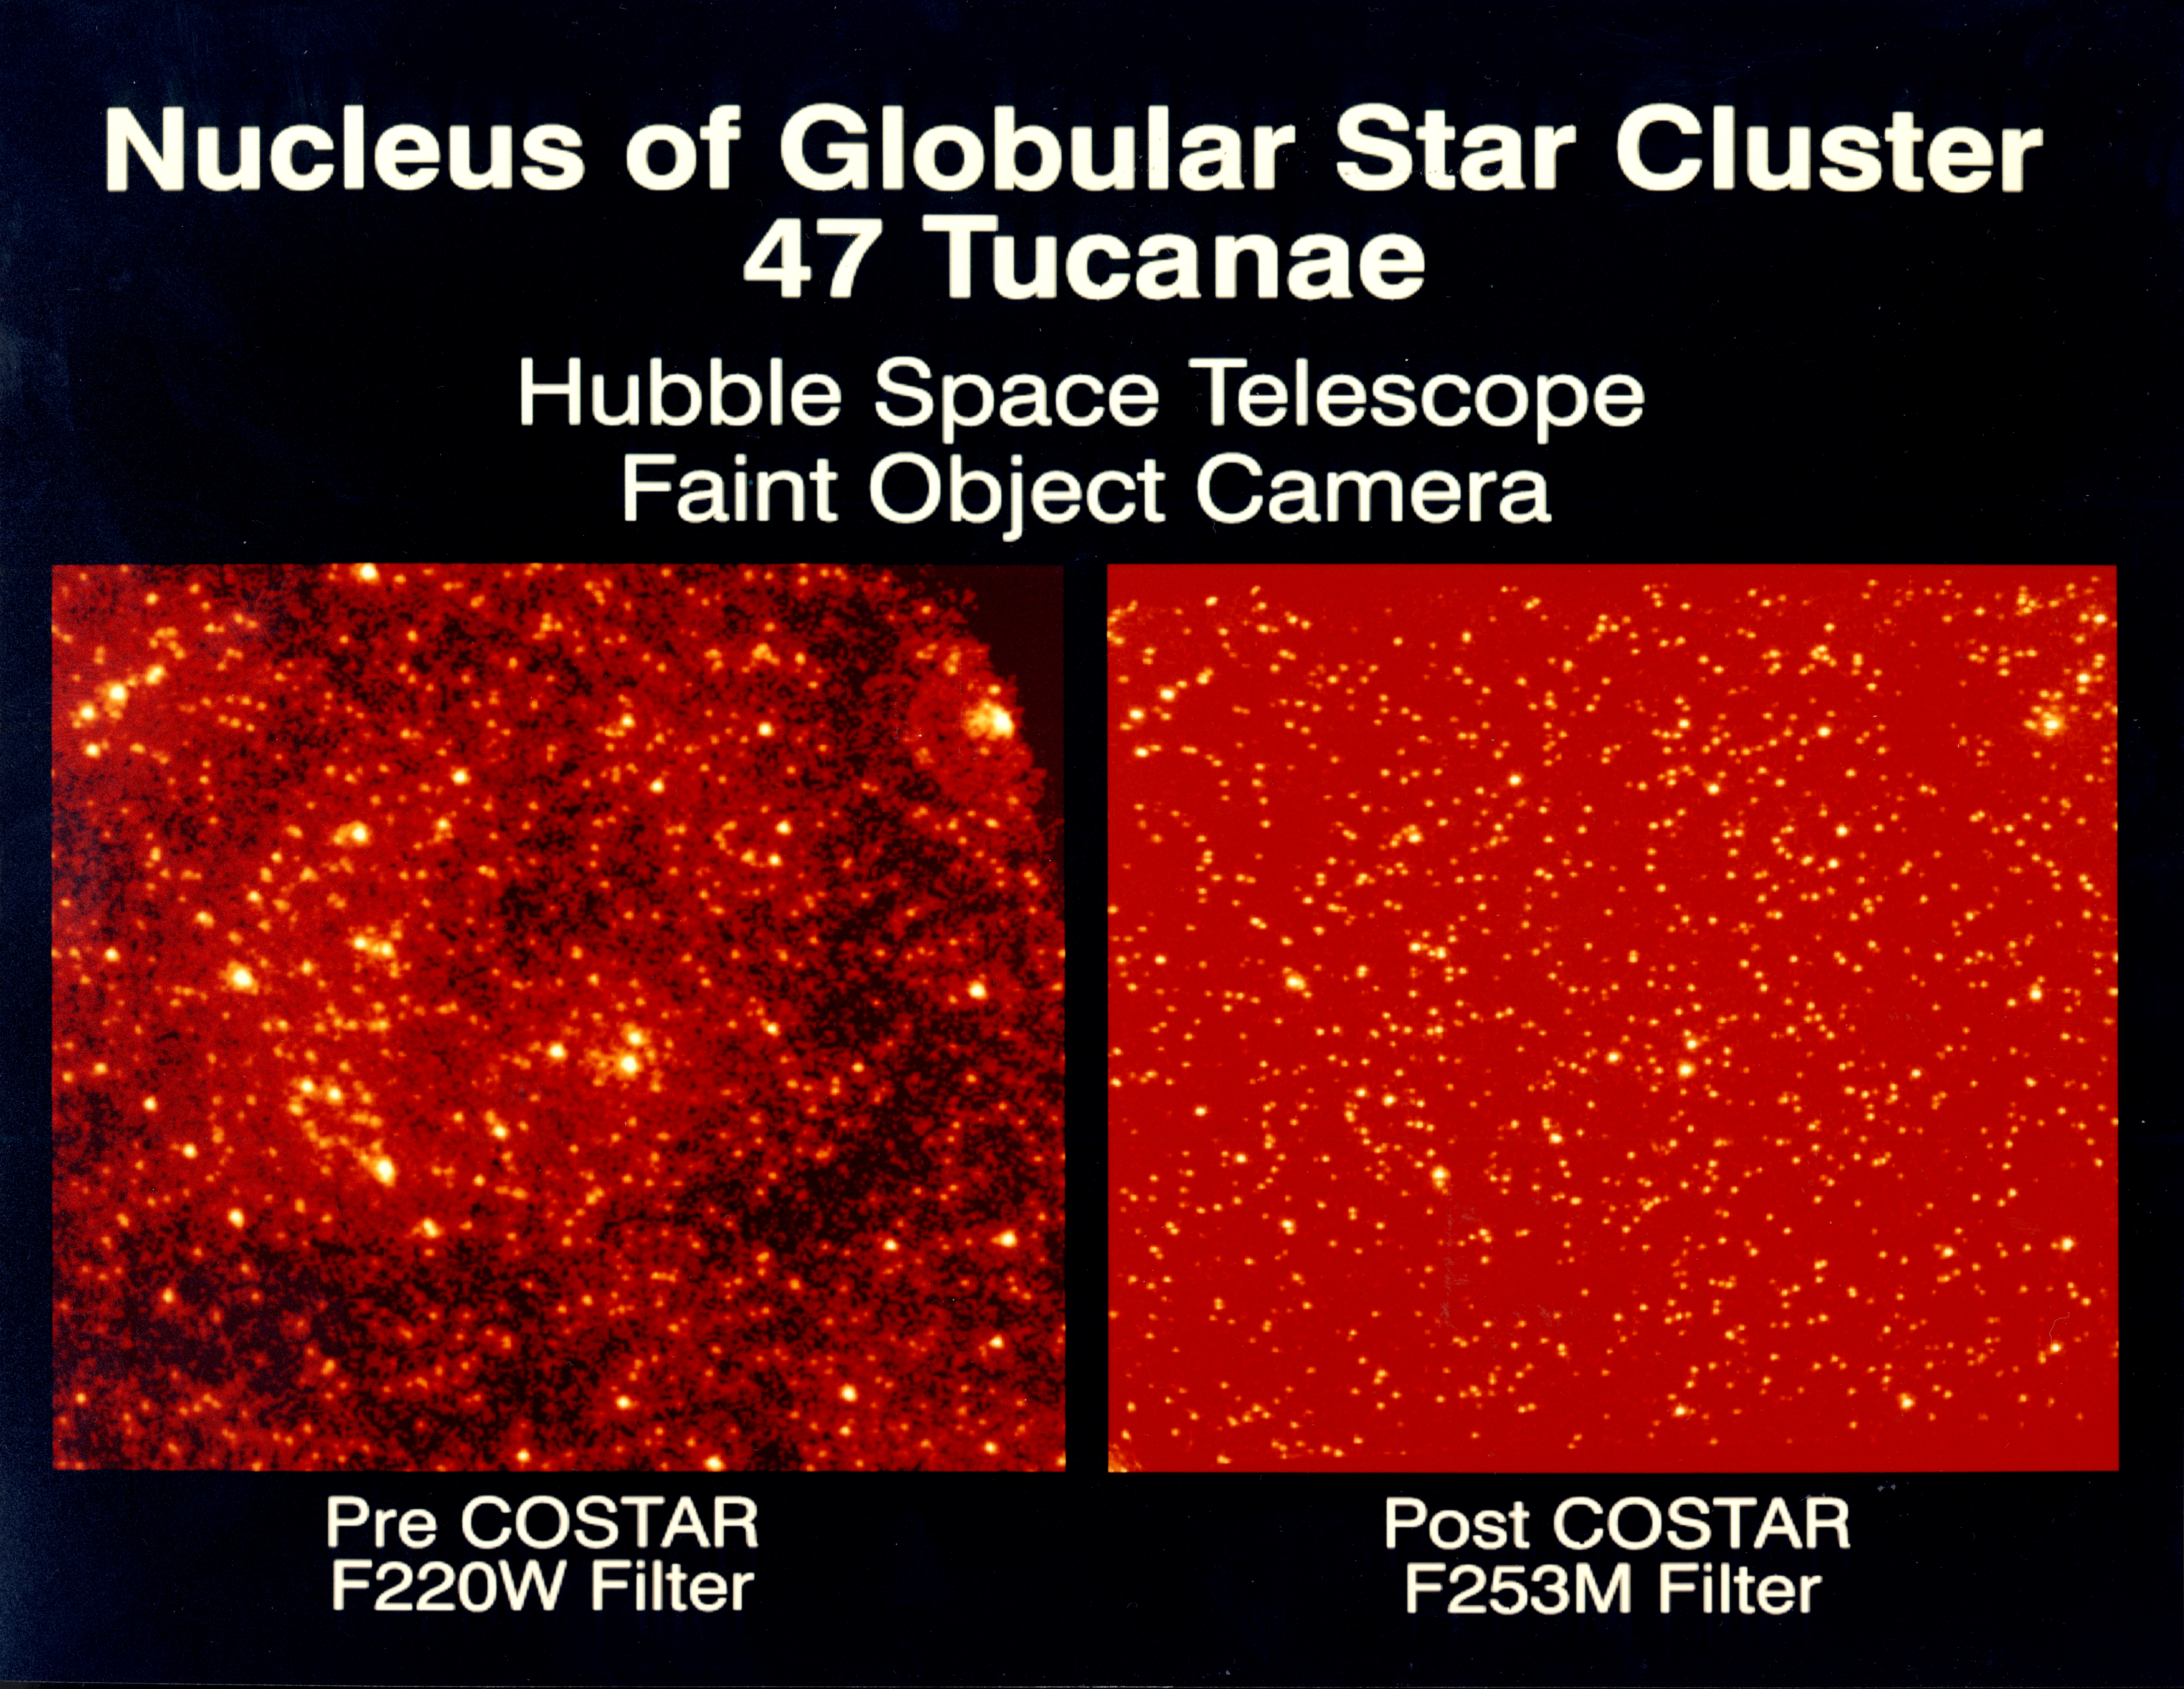

Star cluster

These comparison images of the core of the globular cluster 47 Tucanae (NGC104) were taken with the COSTAR Corrected Faint Object Camera to show the improvement in performance when compared to images taken with the uncorrected camera.

Credit: Dr. R. Jedrzejewski (STScI), NASA, ESA